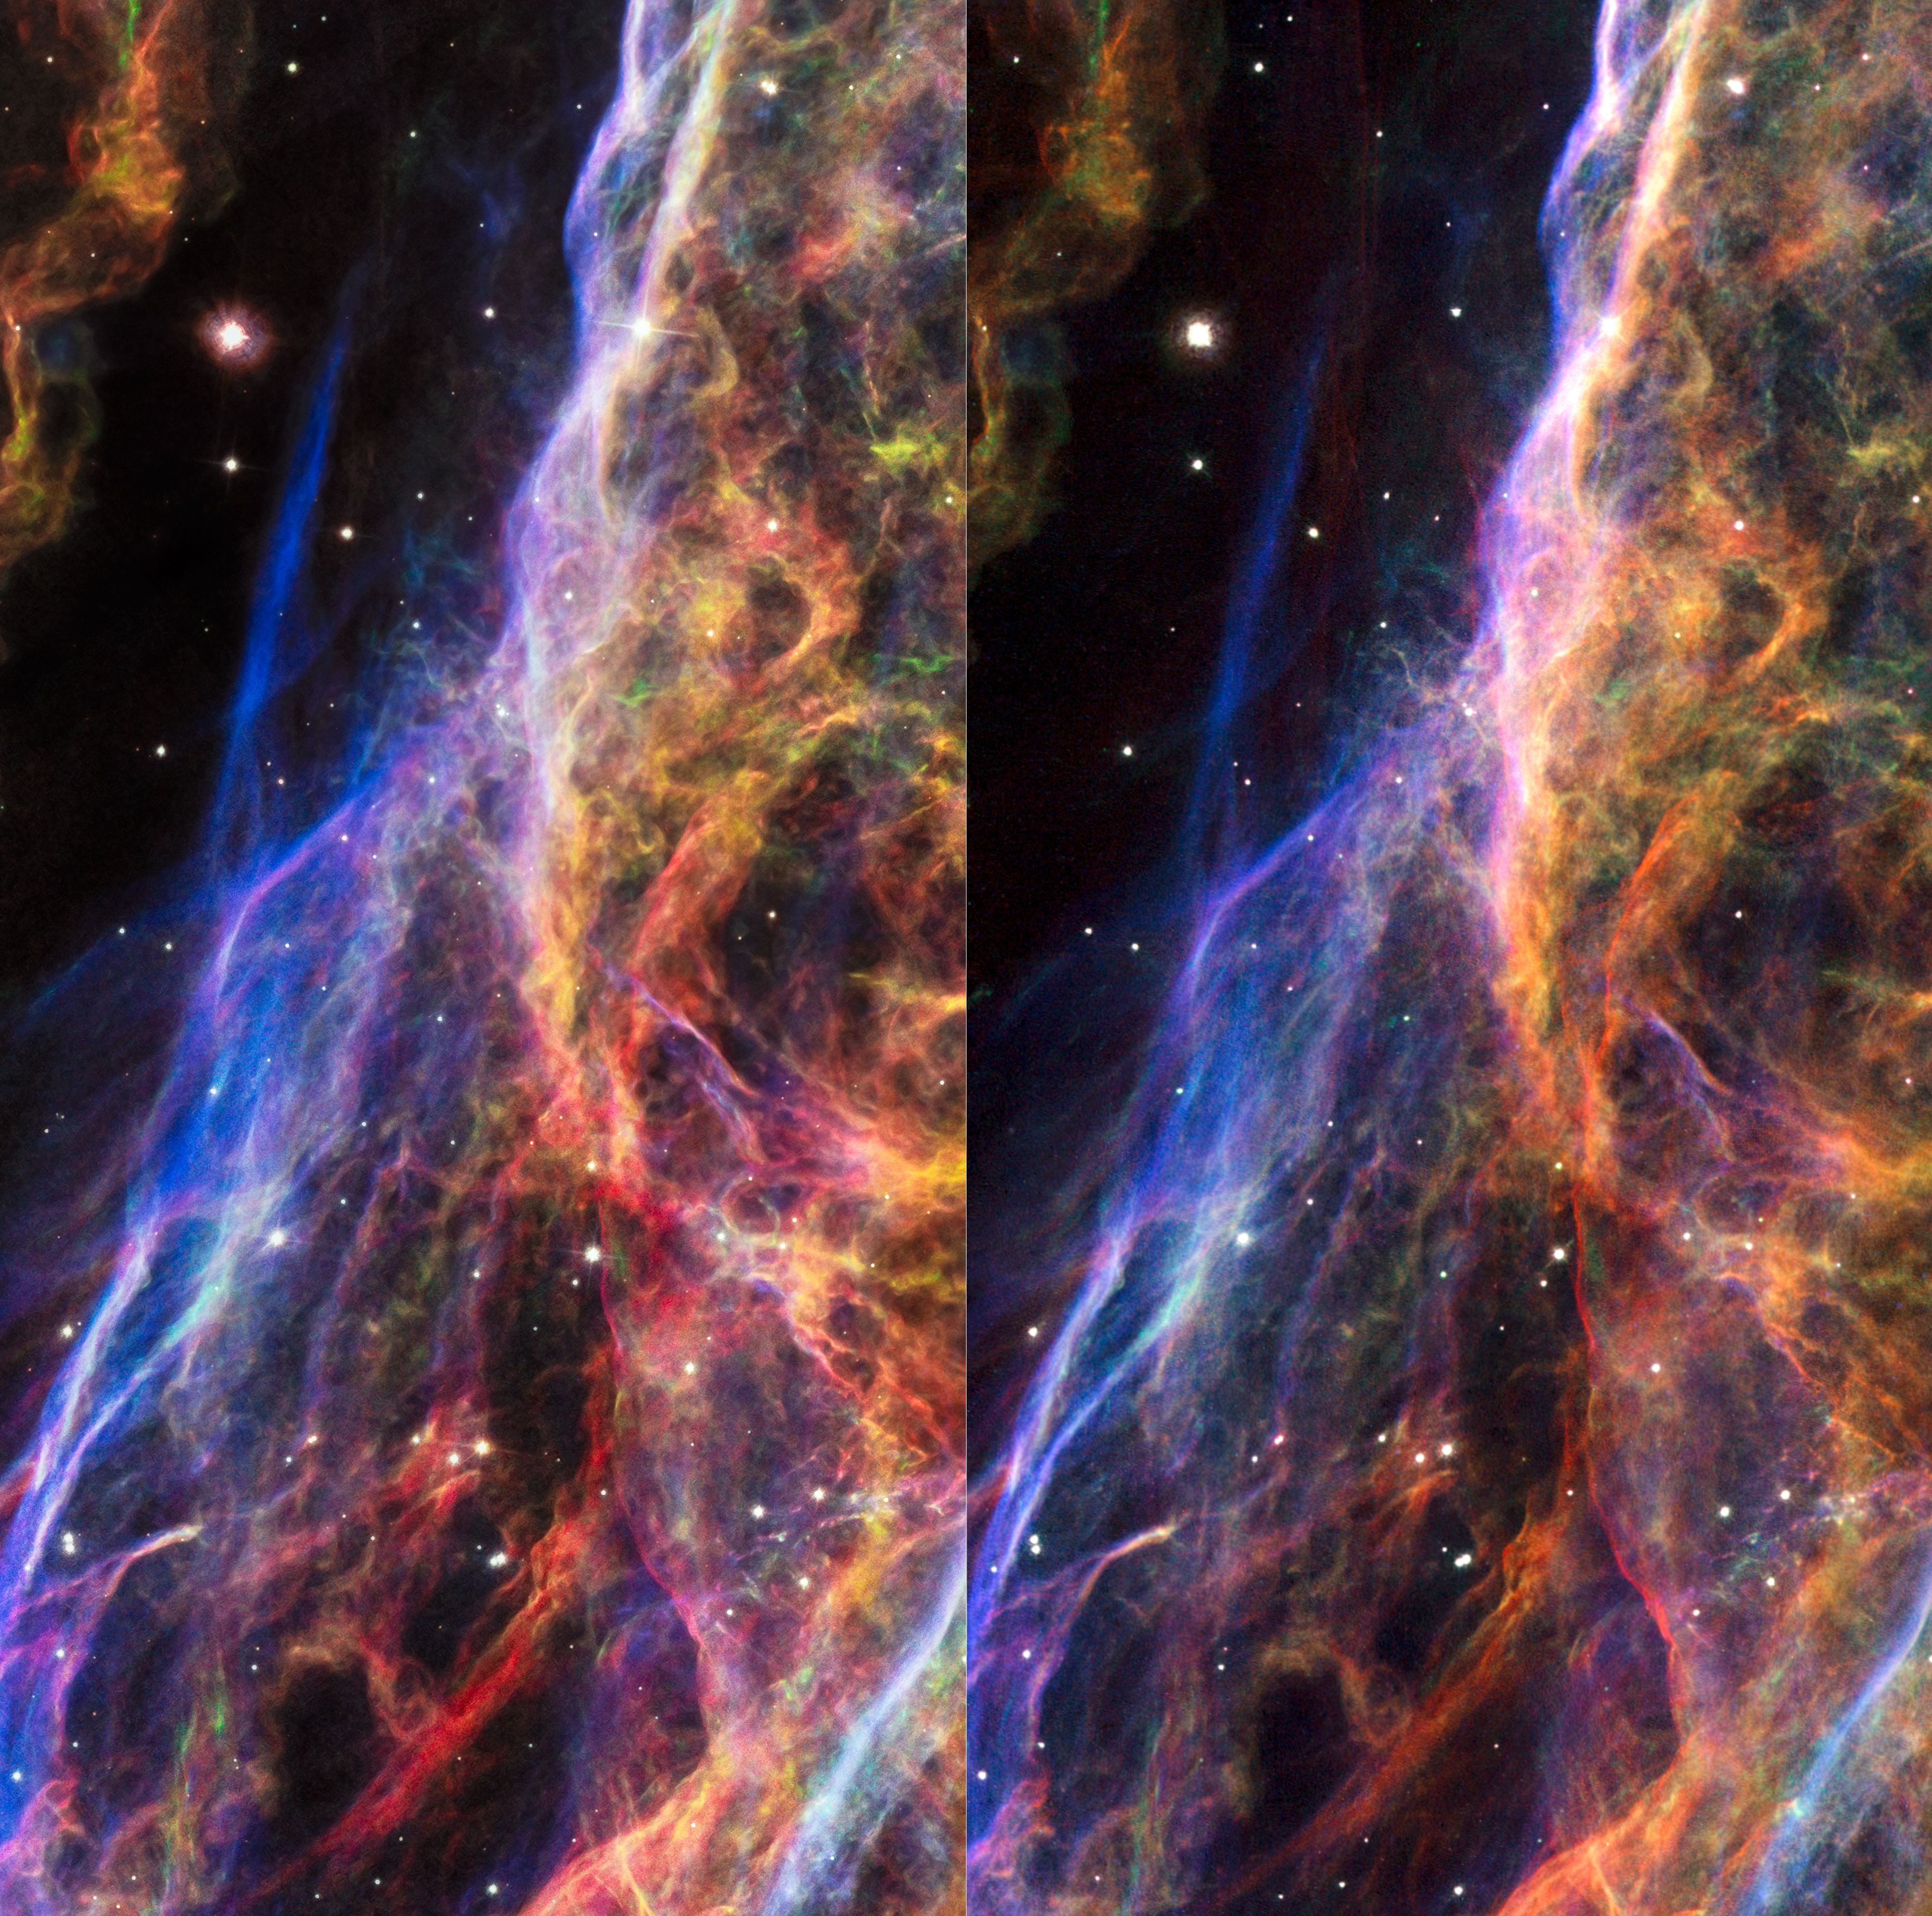

Stereo image of the Veil Nebula

This is a stereo image of the Veil Nebula, using observations made by the NASA/ESA Hubble Space Telescope in 1997 and in 2015. If looked at them cross-eyed these two-dimensional images are then combined by the brain to give the perception of 3D depth. This illusion is created due to the movements of the filaments between the two observations.

Credit: NASA, ESA, Hubble Heritage Team